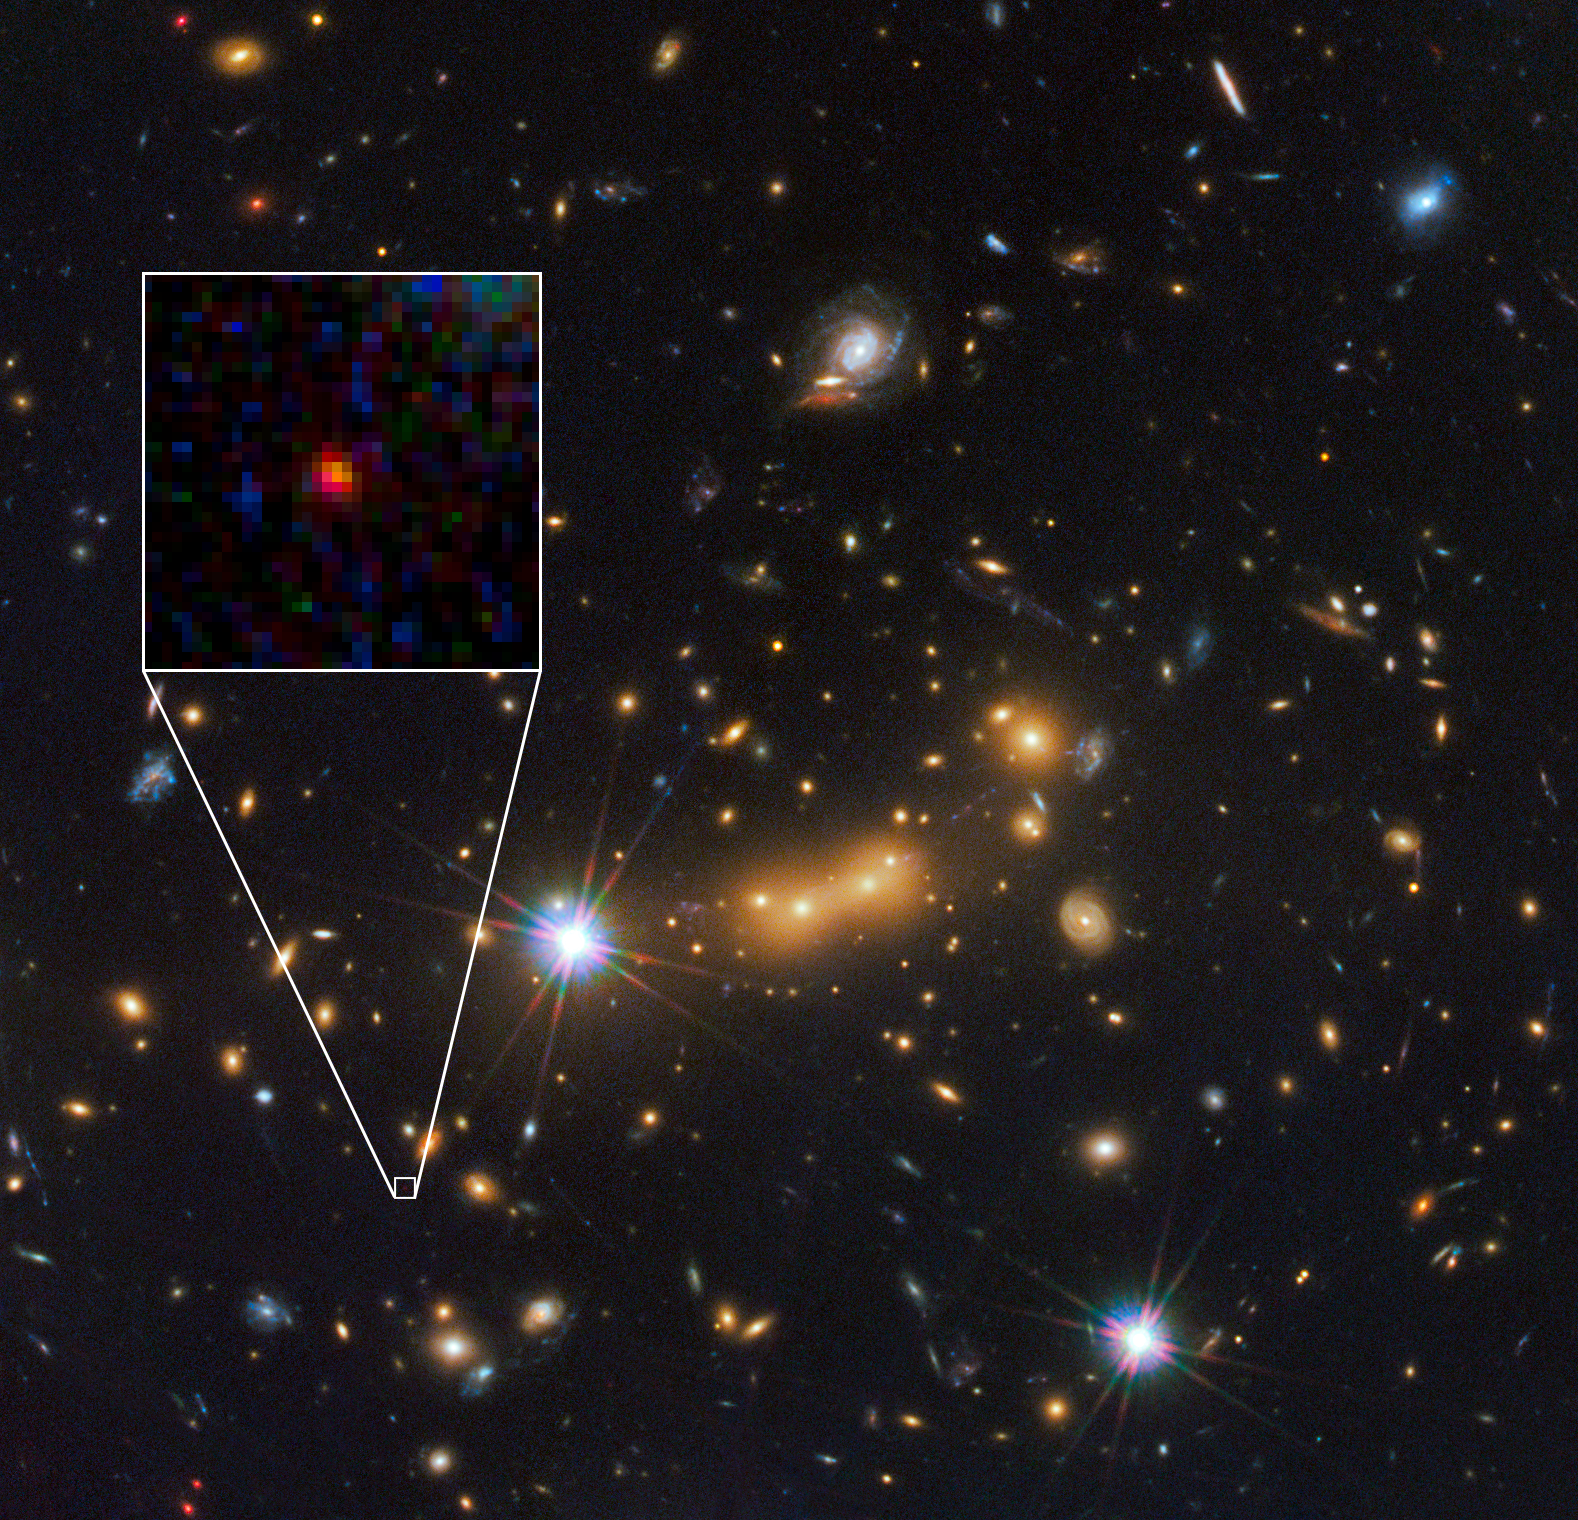

Hubble spots candidate for most distant known galaxy

In this image, astronomers use the NASA/ESA Hubble Space Telescope and a cosmic zoom lens to uncover the farthest known galaxy in the Universe.

The newly discovered galaxy, named MACS0647-JD, is very young and only a tiny fraction of the size of our Milky Way. The object is observed 420 million years after the Big Bang, when the Universe was 3 percent of its present age of 13.7 billion years. The inset at left shows a close-up of the young dwarf galaxy.

This is the latest discovery from a large program that uses massive clusters of galaxies as natural zoom lenses to reveal distant galaxies in the early universe. Called the Cluster Lensing And
Supernova survey with Hubble (CLASH), the program allows astronomers to use the gravity of massive galaxy clusters to magnify distant galaxies behind them, an effect called gravitational lensing.

In this Hubble observation, astronomers used the massive galaxy cluster MACS J0647.7+7015 as the giant cosmic telescope. The bright yellow galaxies near the center of the image are cluster members. The cluster’s gravity boosted the light from the faraway galaxy, making its image appear approximately eight times brighter than it otherwise would. The gravitational lensing technique allowed astronomers to detect the galaxy more efficiently and with greater confidence. Without the cluster’s magnification powers, astronomers would not have seen this remote galaxy.

This image is a composite taken with Hubble’s Wide Field Camera 3 and the Advanced Camera for Surveys. The observations were taken 5 October and 29 November 2011.

Credit: NASA, ESA, and M. Postman and D. Coe (Space Telescope Science Institute), and the CLASH team